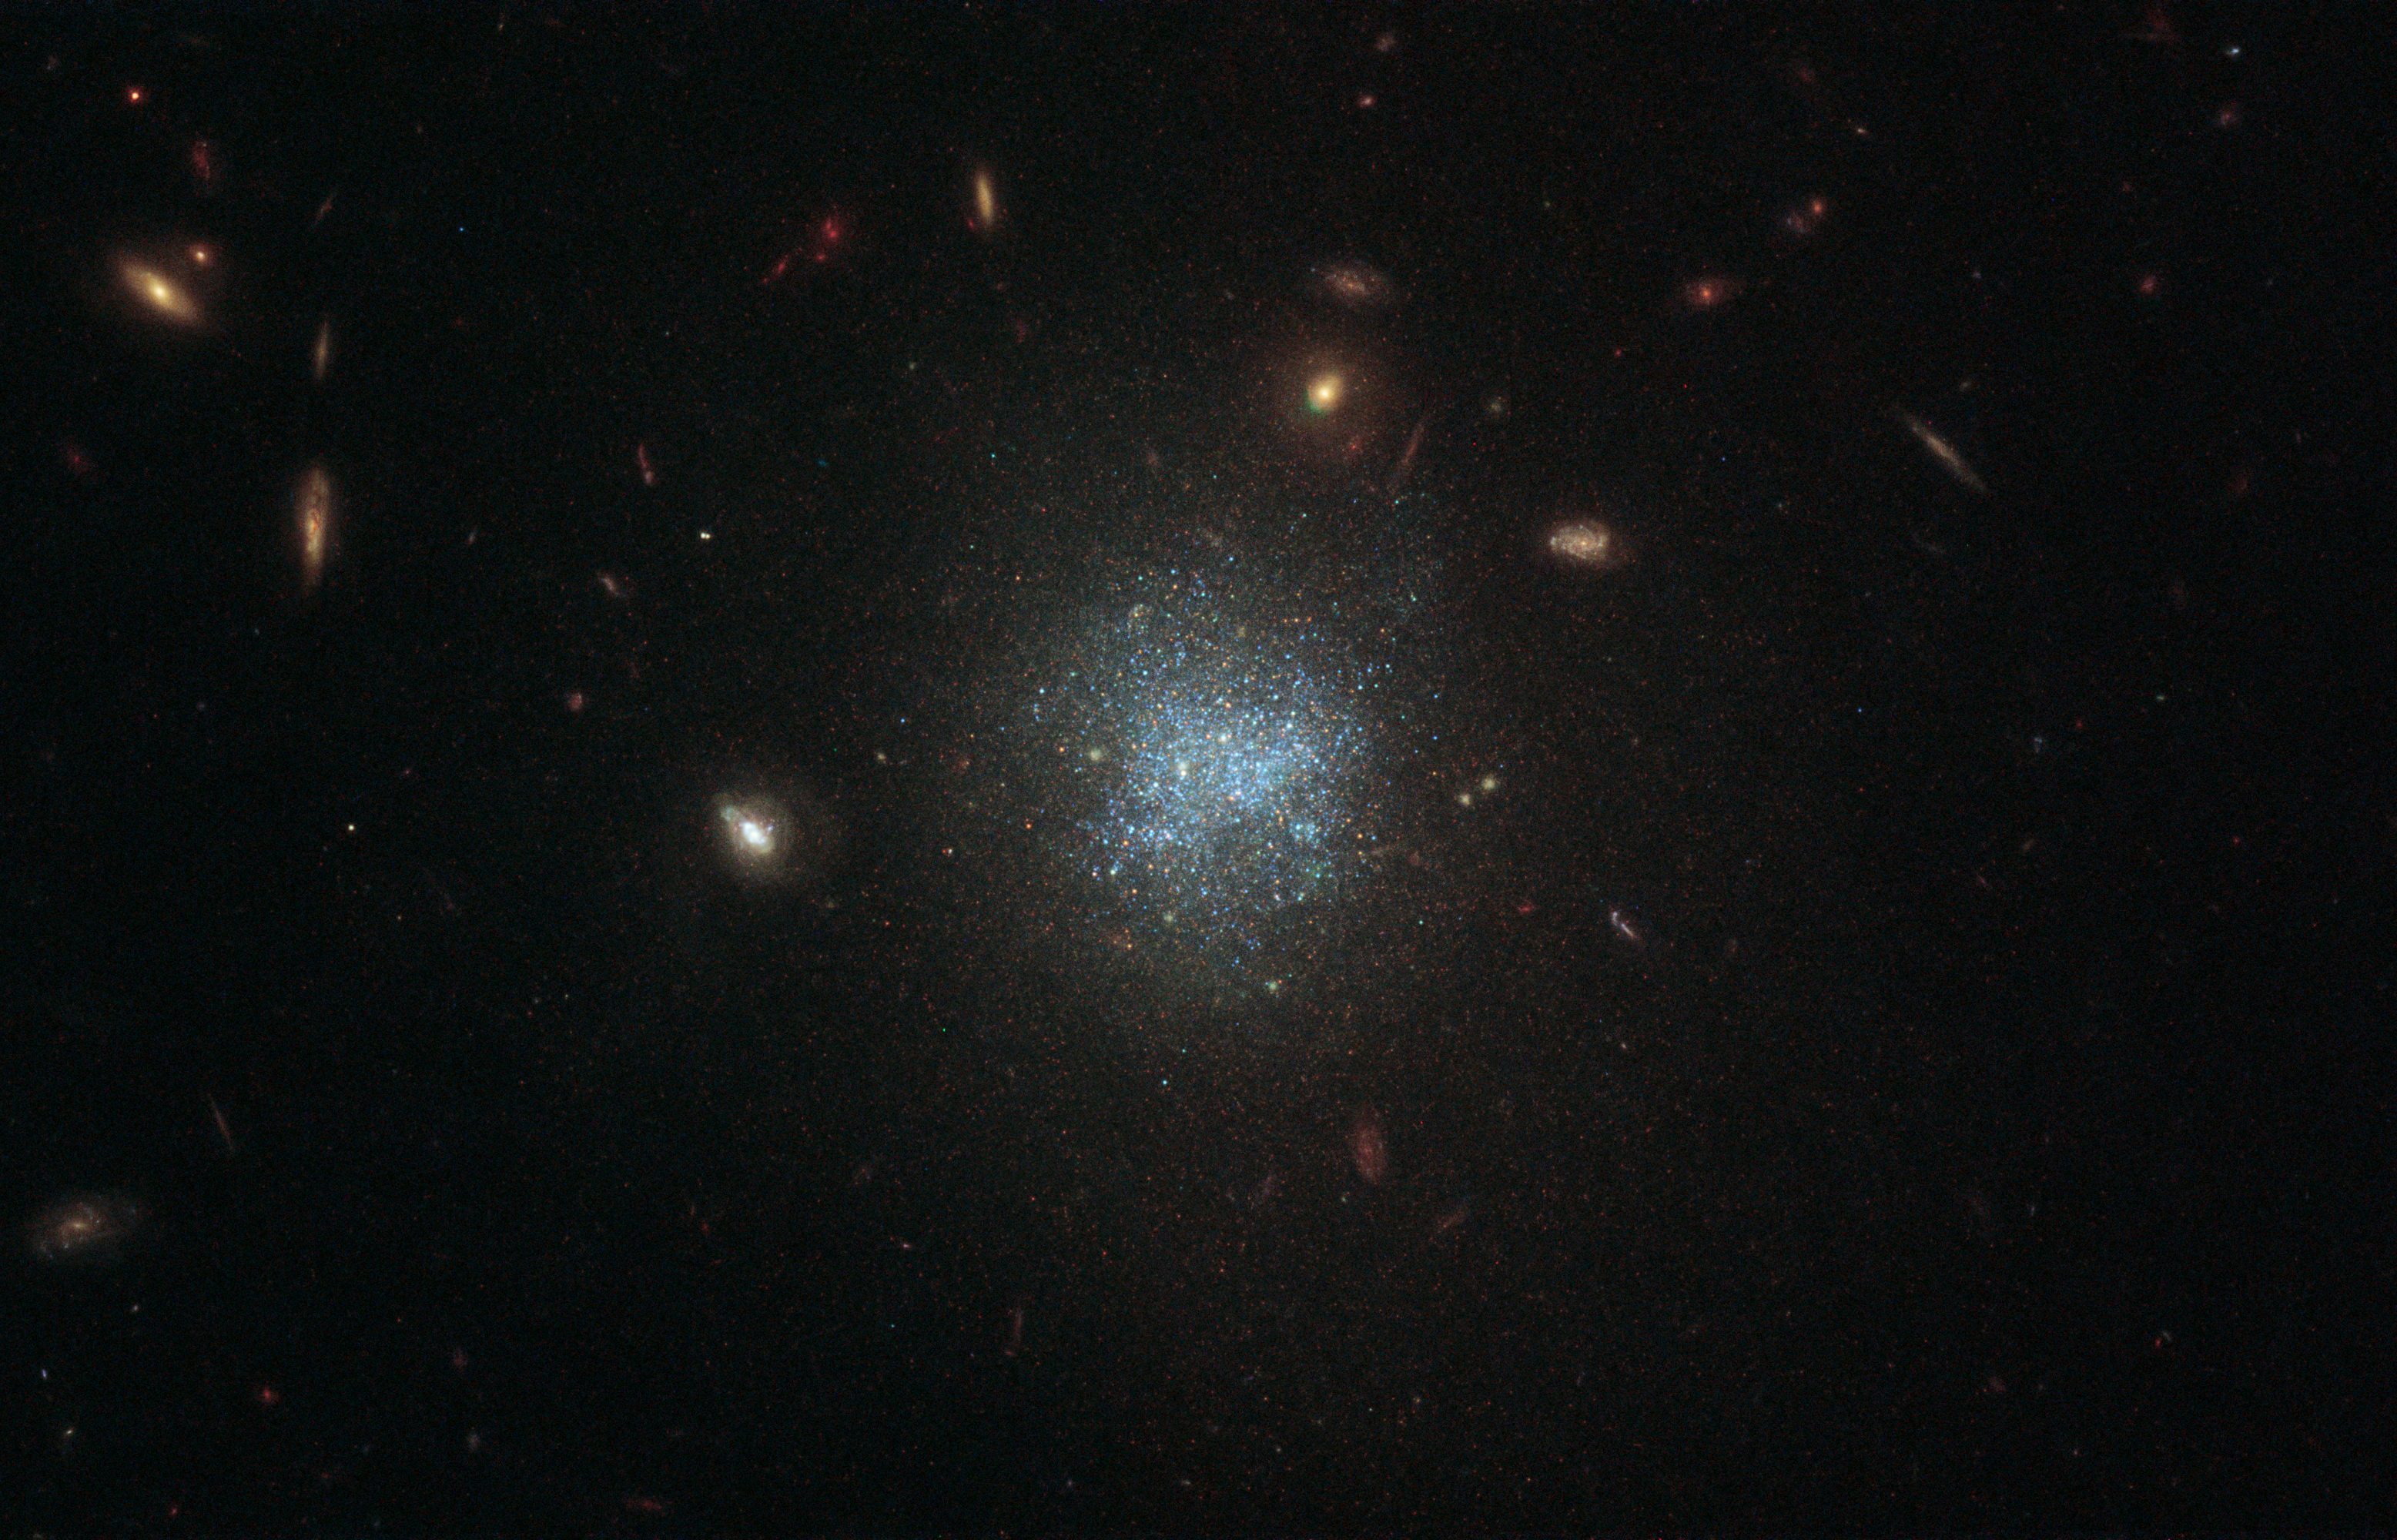

Dark Matter in the Belly of the Whale

This image, taken with the NASA/ESA Hubble Space Telescope, focuses on an object named UGC 695, which is located 30 million light-years away within the constellation Cetus (The Sea Monster), also known as The Whale.

UGC 695 is a low-surface-brightness (LSB) galaxy. These galaxies are so faint that their brightness is less than the background brightness of Earth’s atmosphere, which makes them tricky to observe. This low brightness is the result of the relatively small number of stars within them — most of the baryonic matter in these galaxies exists in the form of huge clouds of gas and dust. The stars are also distributed over a relatively large area.

LSB galaxies, like dwarf galaxies, have a high fraction of dark matter relative to the number of stars they contain. Astronomers still debate about how LSB galaxies formed in the first place.

Credit: ESA/Hubble & NASA, D. Calzetti